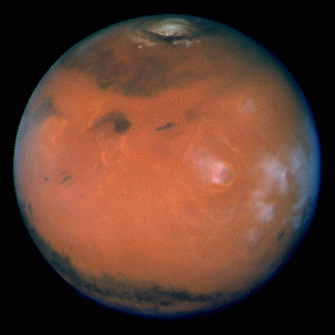

Mars at Opposition

Pictures of the planet Mars taken with the recently refurbished Hubble Space Telescope (HST) will provide the most detailed global view of the red planet ever obtained from Earth.

Credit: David Crisp and the WFPC2 Science Team (Jet Propulsion Laboratory/California Institute of Technology)